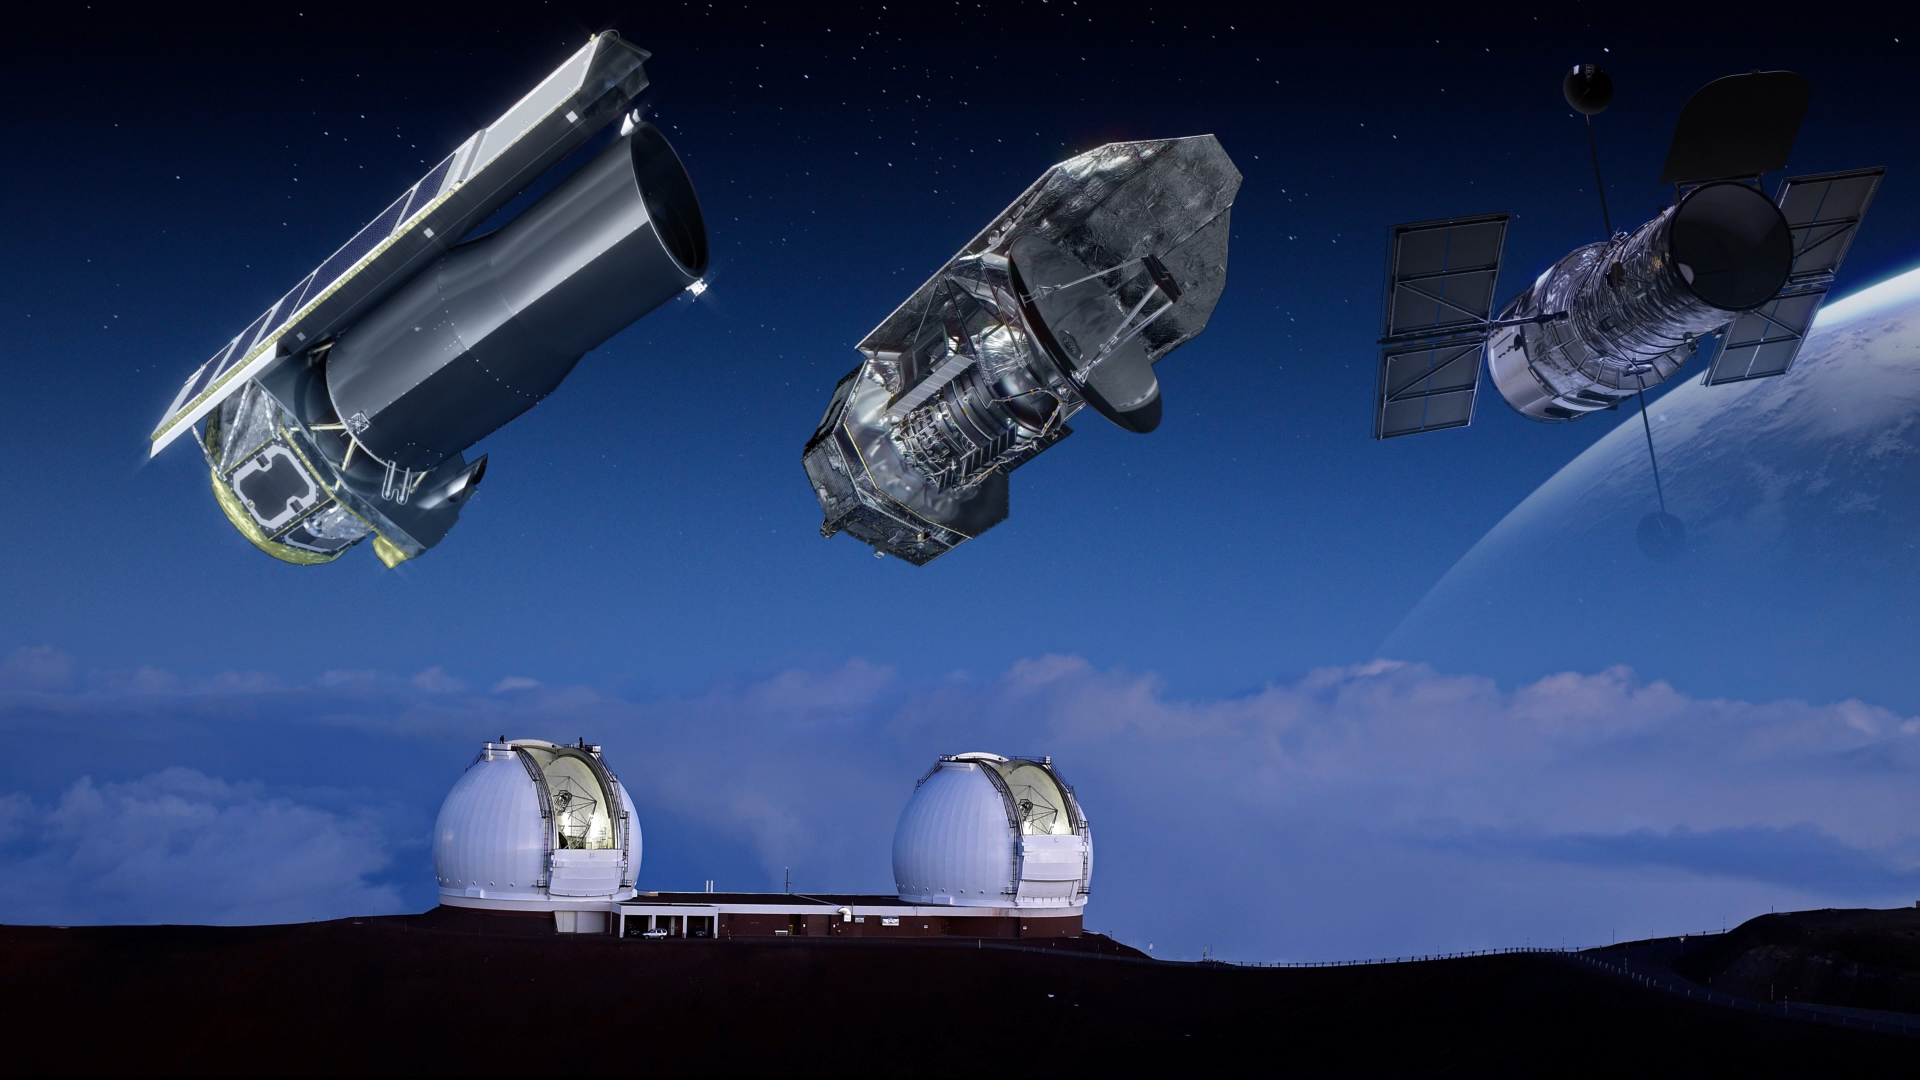

Still from Hubblecast 93: Telescope Teamwork

This is a still from Hubblecast 93, which focuses on past and future collaborations between Hubble and other telescopes, both in space and on the ground.

Credit: NASA & ESA